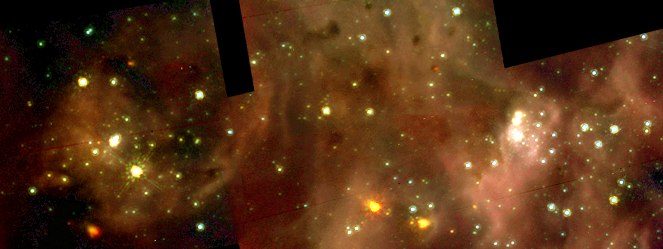

A Grand View of the Birth of 'Hefty Stars' - 30 Doradus Nebula Details (Hubble NICMOS View)

The bottom panel is a composite of pictures taken through three infrared filters with Hubble's Near Infrared Camera and Multi-Object Spectrometer (NICMOS). In both cases the colours of the displays were chosen to correlate with the nebula's and stars' true colors.

Credit: NASA/ESA/Nolan Walborn ( Space Telescope Science Institute, Baltimore, Md.) and Rodolfo Barba (La Plata Observatory, La Plata, Argentina)